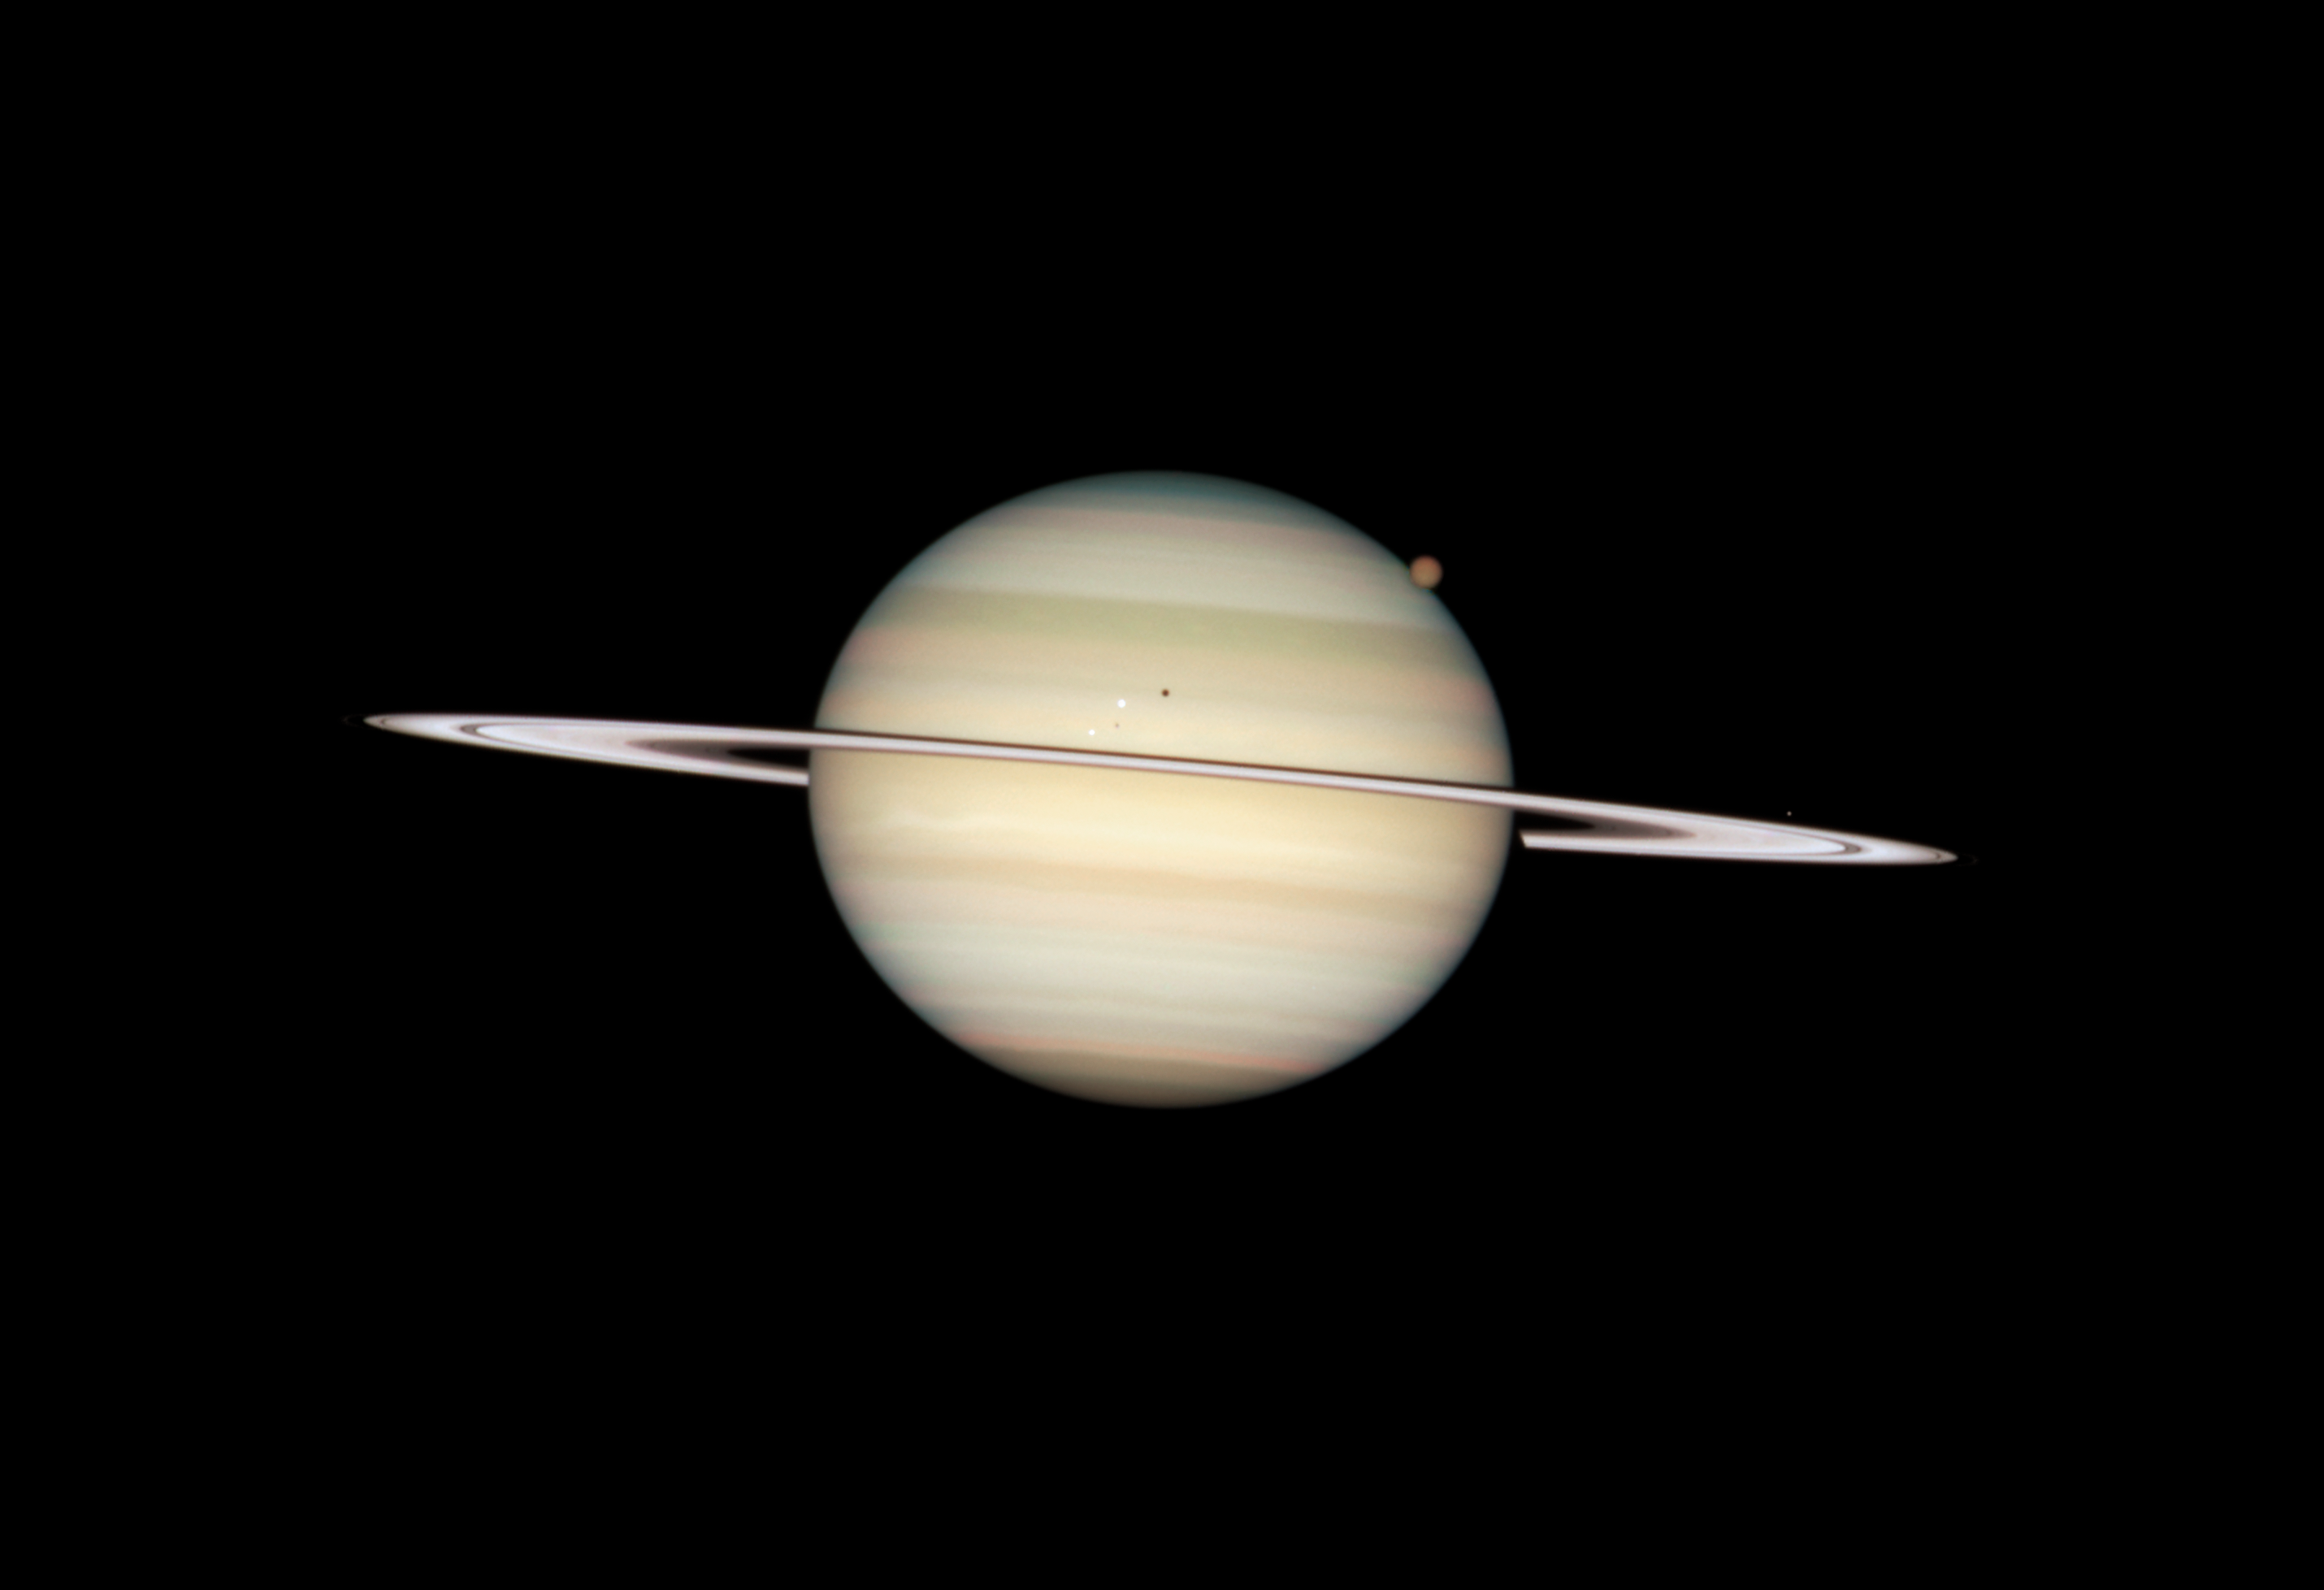

Quadruple Saturn moon transit snapped by Hubble

Hubble Space Telescope Image of Saturn: 24 February 2009 15:27 UT

Credit: NASA, ESA and the Hubble Heritage Team (STScI/AURA). Acknowledgment: M. Wong (STScI/UC Berkeley) and C. Go (Philippines)